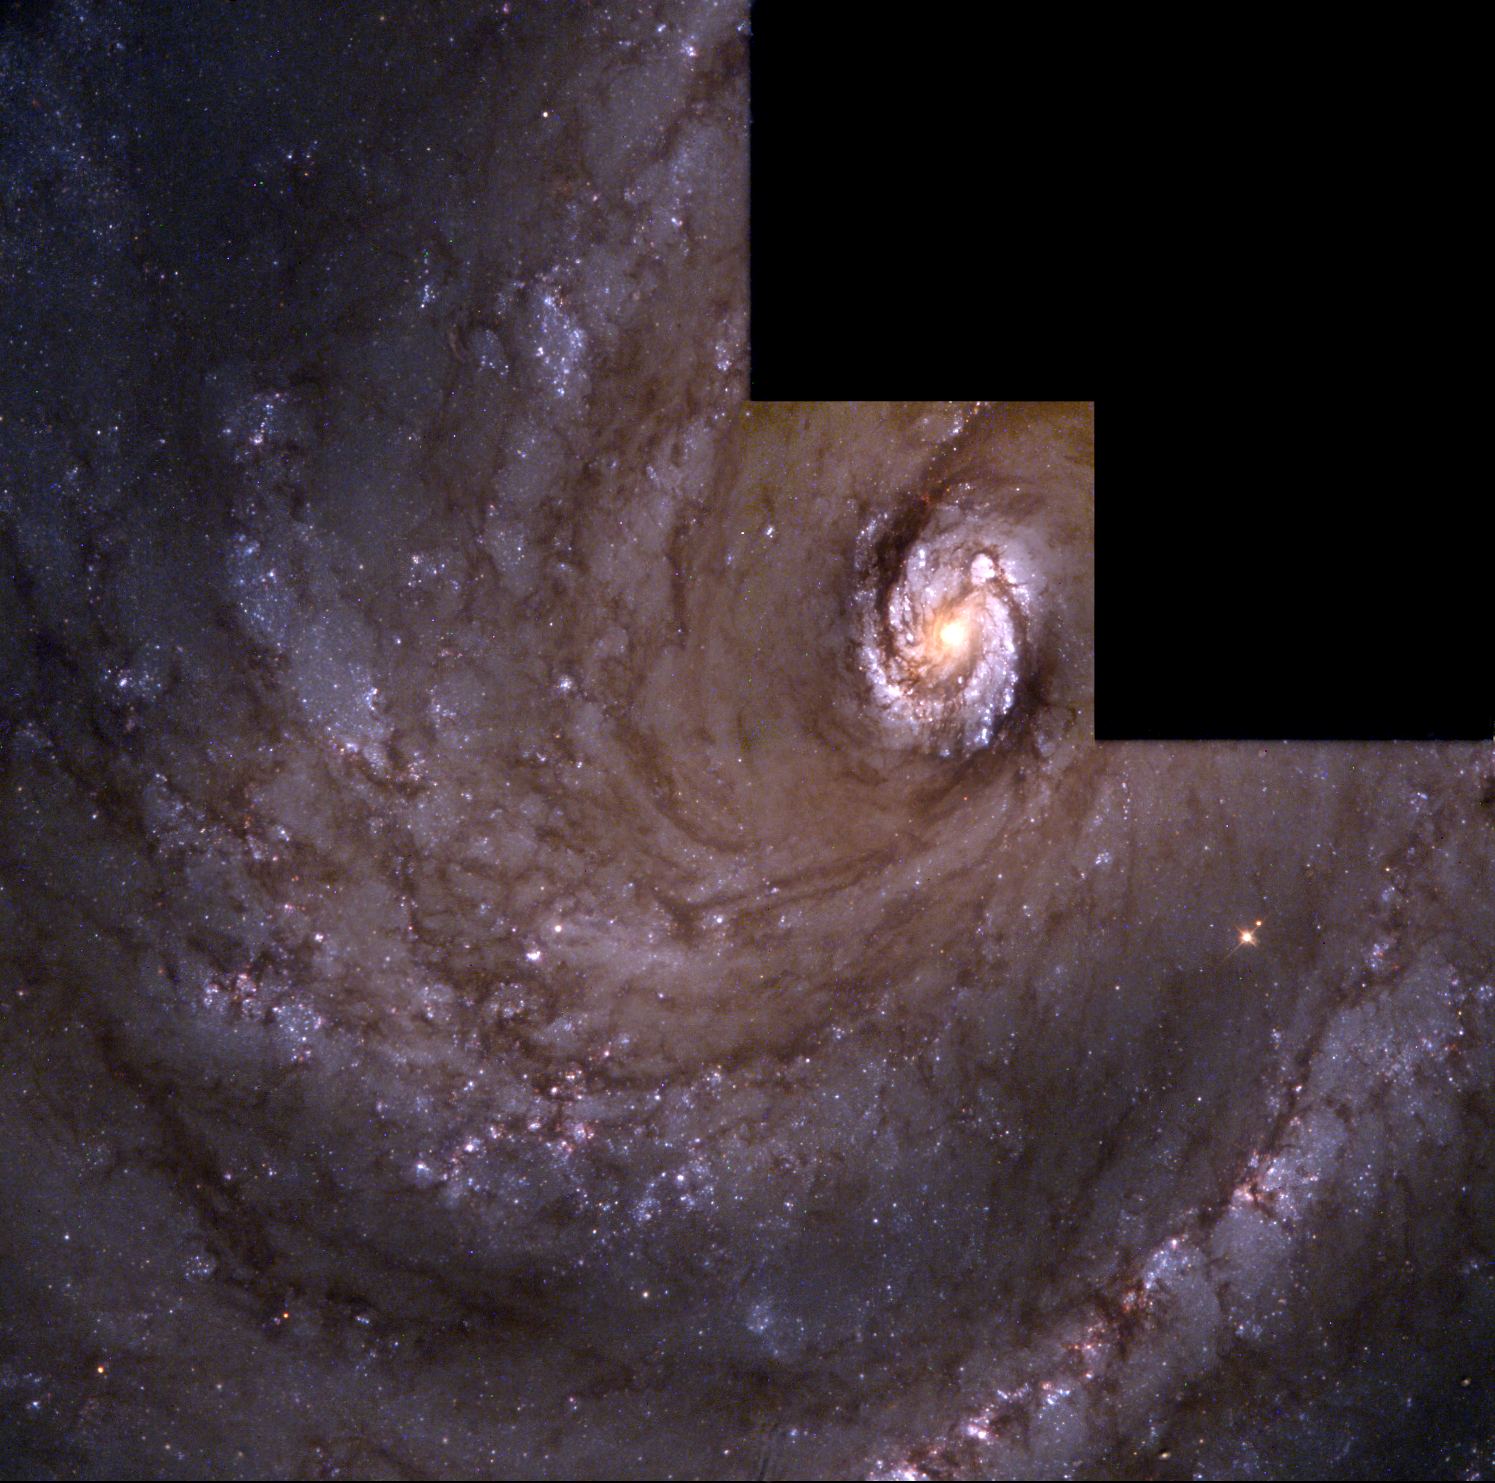

The Spiral Galaxy M 100

An image of the grand design of spiral galaxy M100 obtained with the Hubble Space Telescope resolves individual stars within the majestic spiral arms. (These stars typically appeared blurred together when viewed with ground-based telescopes).

Credit: J. Trauger, JPL and NASA/ESA